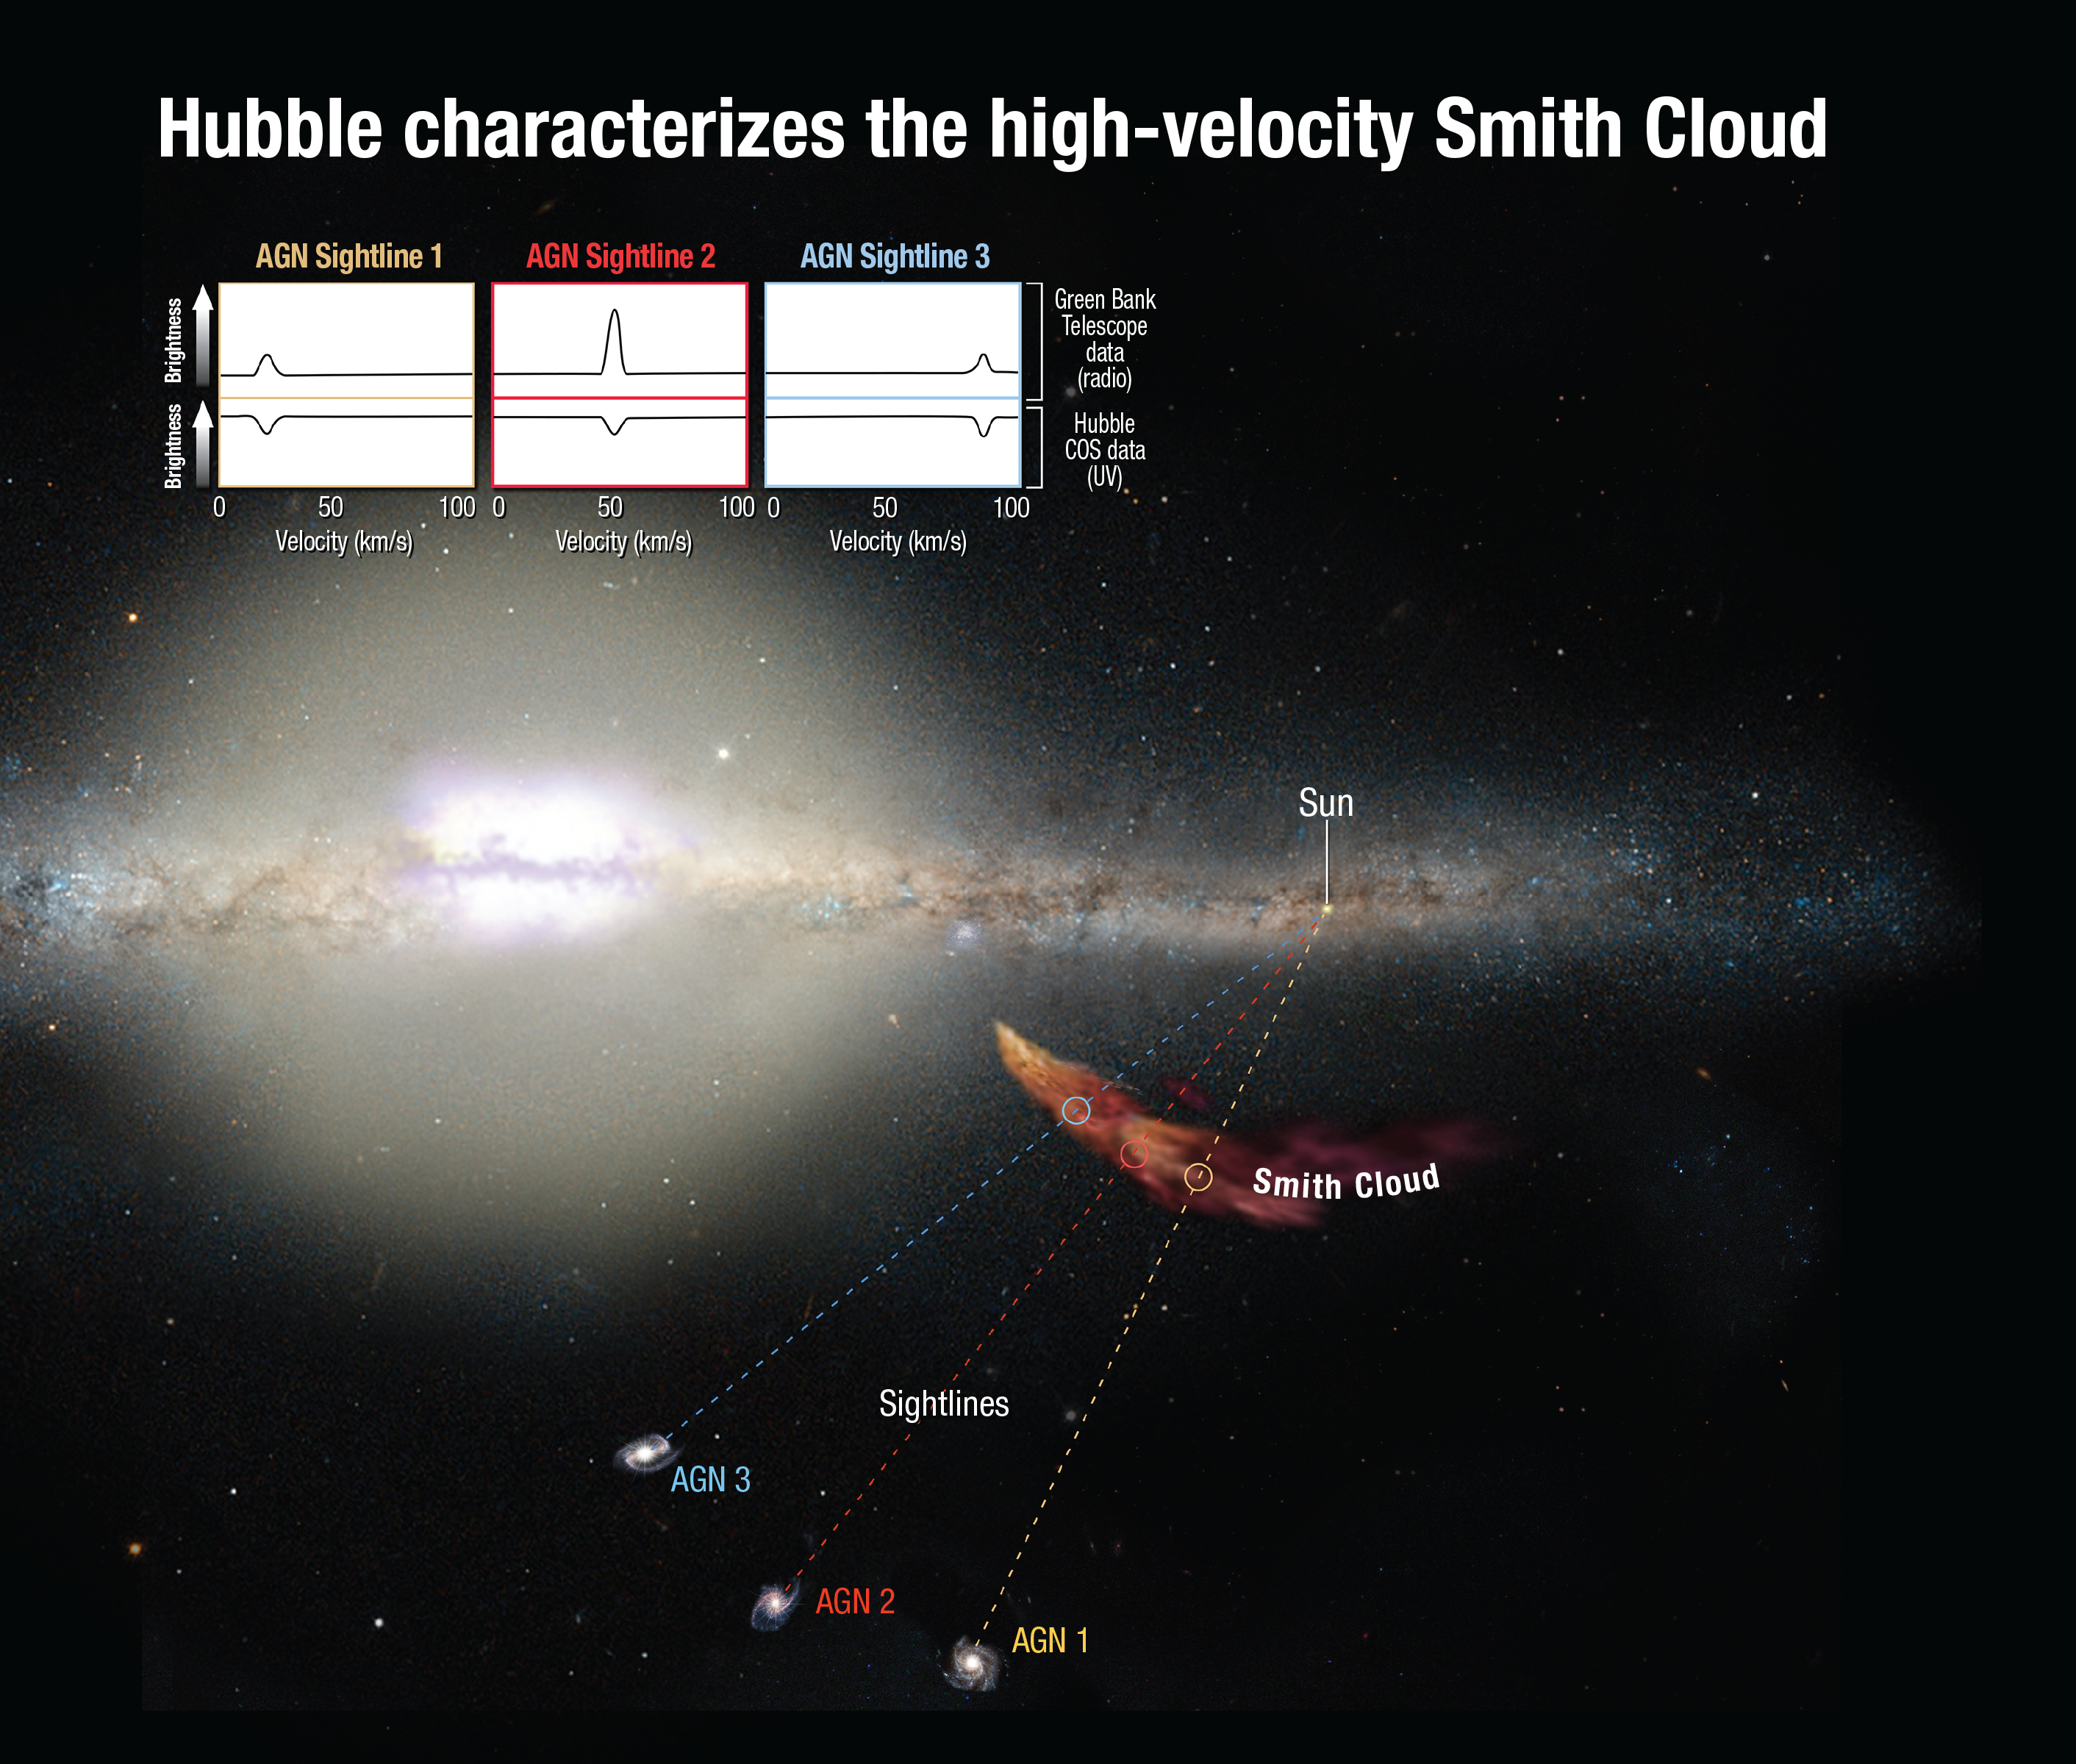

Hubble Characterizes the High-Velocity Smith Cloud

The infalling Smith Cloud does not emit light at wavelengths that the NASA/ESA Hubble Space Telescope is sensitive to. The cloud can be seen in radio wavelengths. However, Hubble's Cosmic Origins Spectrograph can measure how the light from distant background objects is affected as it passes through the cloud. These measurements yield clues to the chemical composition of the cloud. By using these intergalactic forensics, astronomers trace the cloud's origin to the disc of our Milky Way. Combined ultraviolet and radio observations correlate to the cloud's infall velocities, providing solid evidence that the spectral features link to the cloud's dynamics.

Credit: NASA, ESA, and A. Feild (STScI)